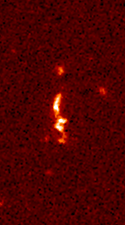

Radio galaxy 3C324

3C324. A number of small interacting components are distributed roughly along the radio axis in this source. Comparison of the Hubble image with that from the United Kingdom Infrared Telescope suggests that the central regions of this galaxy are obscured by a large dust lane.

Credit: M. Longair (Cambridge University, England), NASA/ESA, and NRAO